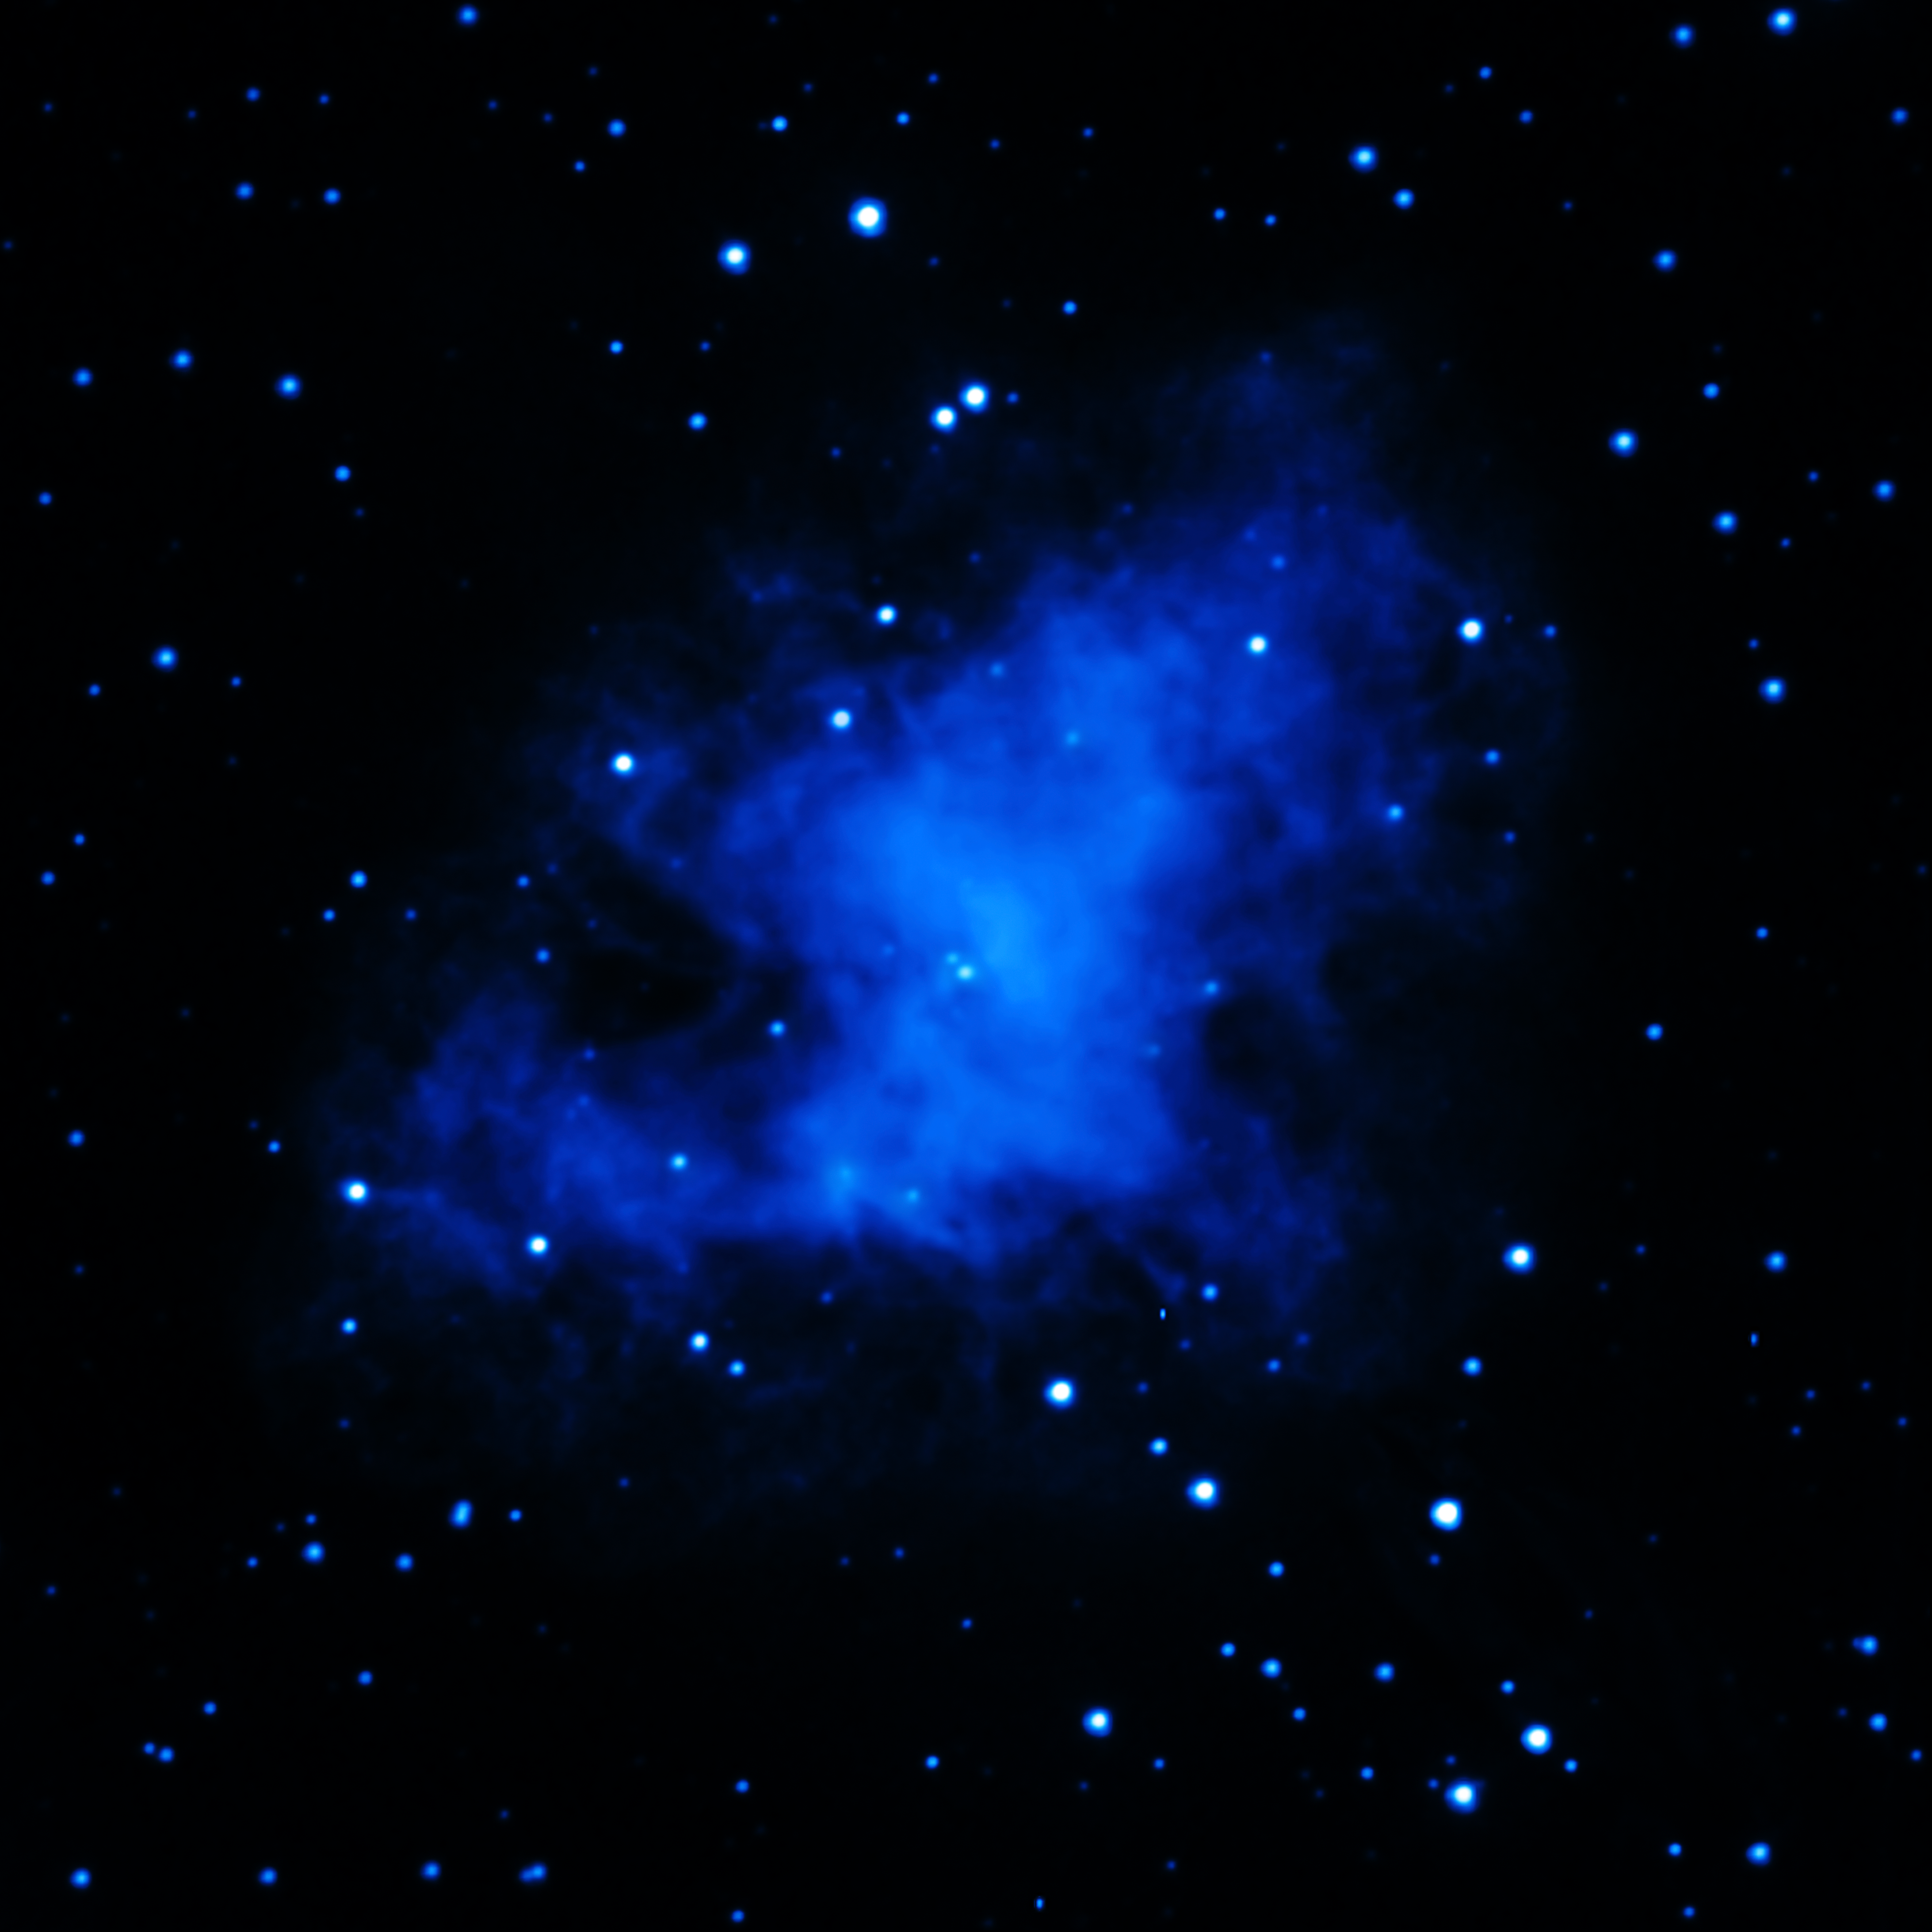

XMM-Newton (ultraviolet) Image of the Crab Nebula

ESA’s XMM-Newton telescope observed the Crab Nebula, a supernova remnant located 6500 light-years from Earth, in the ultraviolet.

Credit: ESA